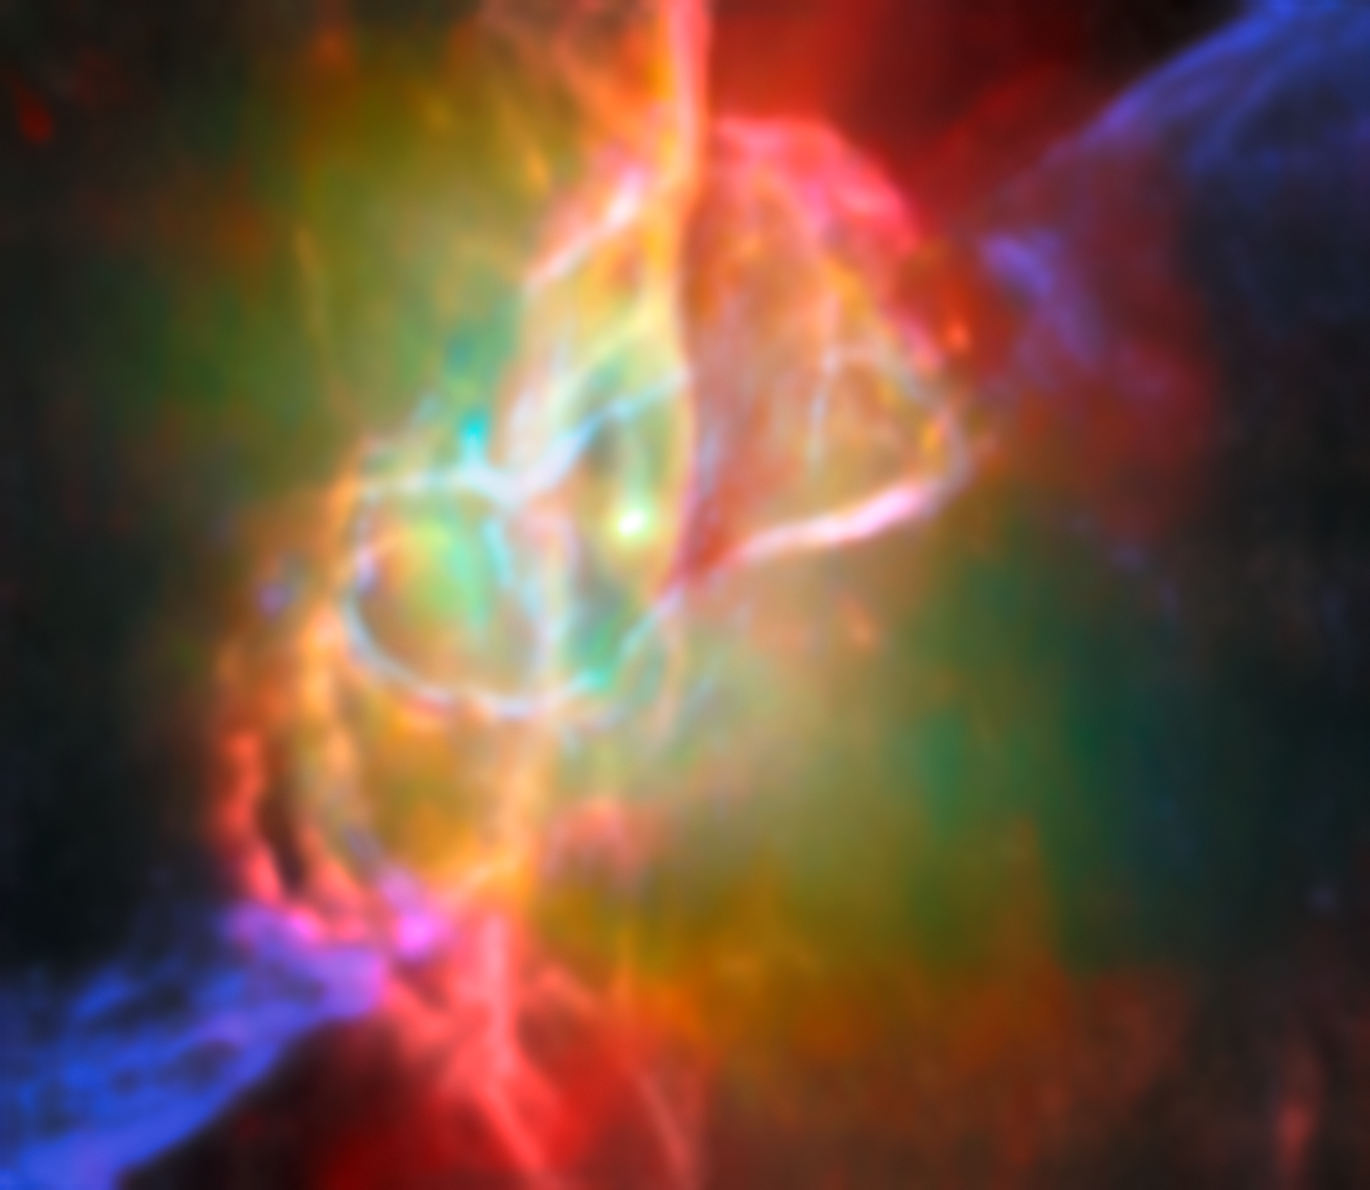

Butterfly Nebula NGC 6302 (Webb and ALMA image)

This image takes the viewer on a deep dive into the heart of the Butterfly Nebula, NGC 6302. The Butterfly Nebula, located about 3400 light-years away in the constellation Scorpius, is one of the best-studied planetary nebulae in our galaxy.

Planetary nebulae are among the most beautiful and most elusive creatures in the cosmic zoo. These nebulae form when stars with masses between about 0.8 and 8 times the mass of the Sun shed most of their mass at the end of their lives. The planetary nebula phase is fleeting, lasting only about 20 000 years.

At the centre of the Butterfly Nebula is the ancient core of a Sun-like star that energises the surrounding nebula and causes it to glow. This scorching central star is hidden from view at optical wavelengths, but Webb’s infrared capabilities have revealed the star and its surroundings in great detail.

This image, which combines infrared data from the NASA/ESA/CSA James Webb Space Telescope with submillimetre observations from the Atacama Large Millimetre/submillimetre Array (ALMA), shows the doughnut-shaped torus and interconnected bubbles of dusty gas that surround the nebula’s central star. The torus is oriented vertically and nearly edge-on from our perspective, and it intersects with bubbles of gas enclosing the star. The bubbles appear bright red in this image, illuminated by the light from helium and neon gas. Outside the bubbles, jets traced by emission from ionised iron shoot off in opposite directions.

These features are labeled in an annotated version of this image.

Credit: ESA/Webb, NASA & CSA, M. Matsuura, ALMA (ESO/NAOJ/NRAO), N. Hirano, M. Zamani (ESA/Webb)